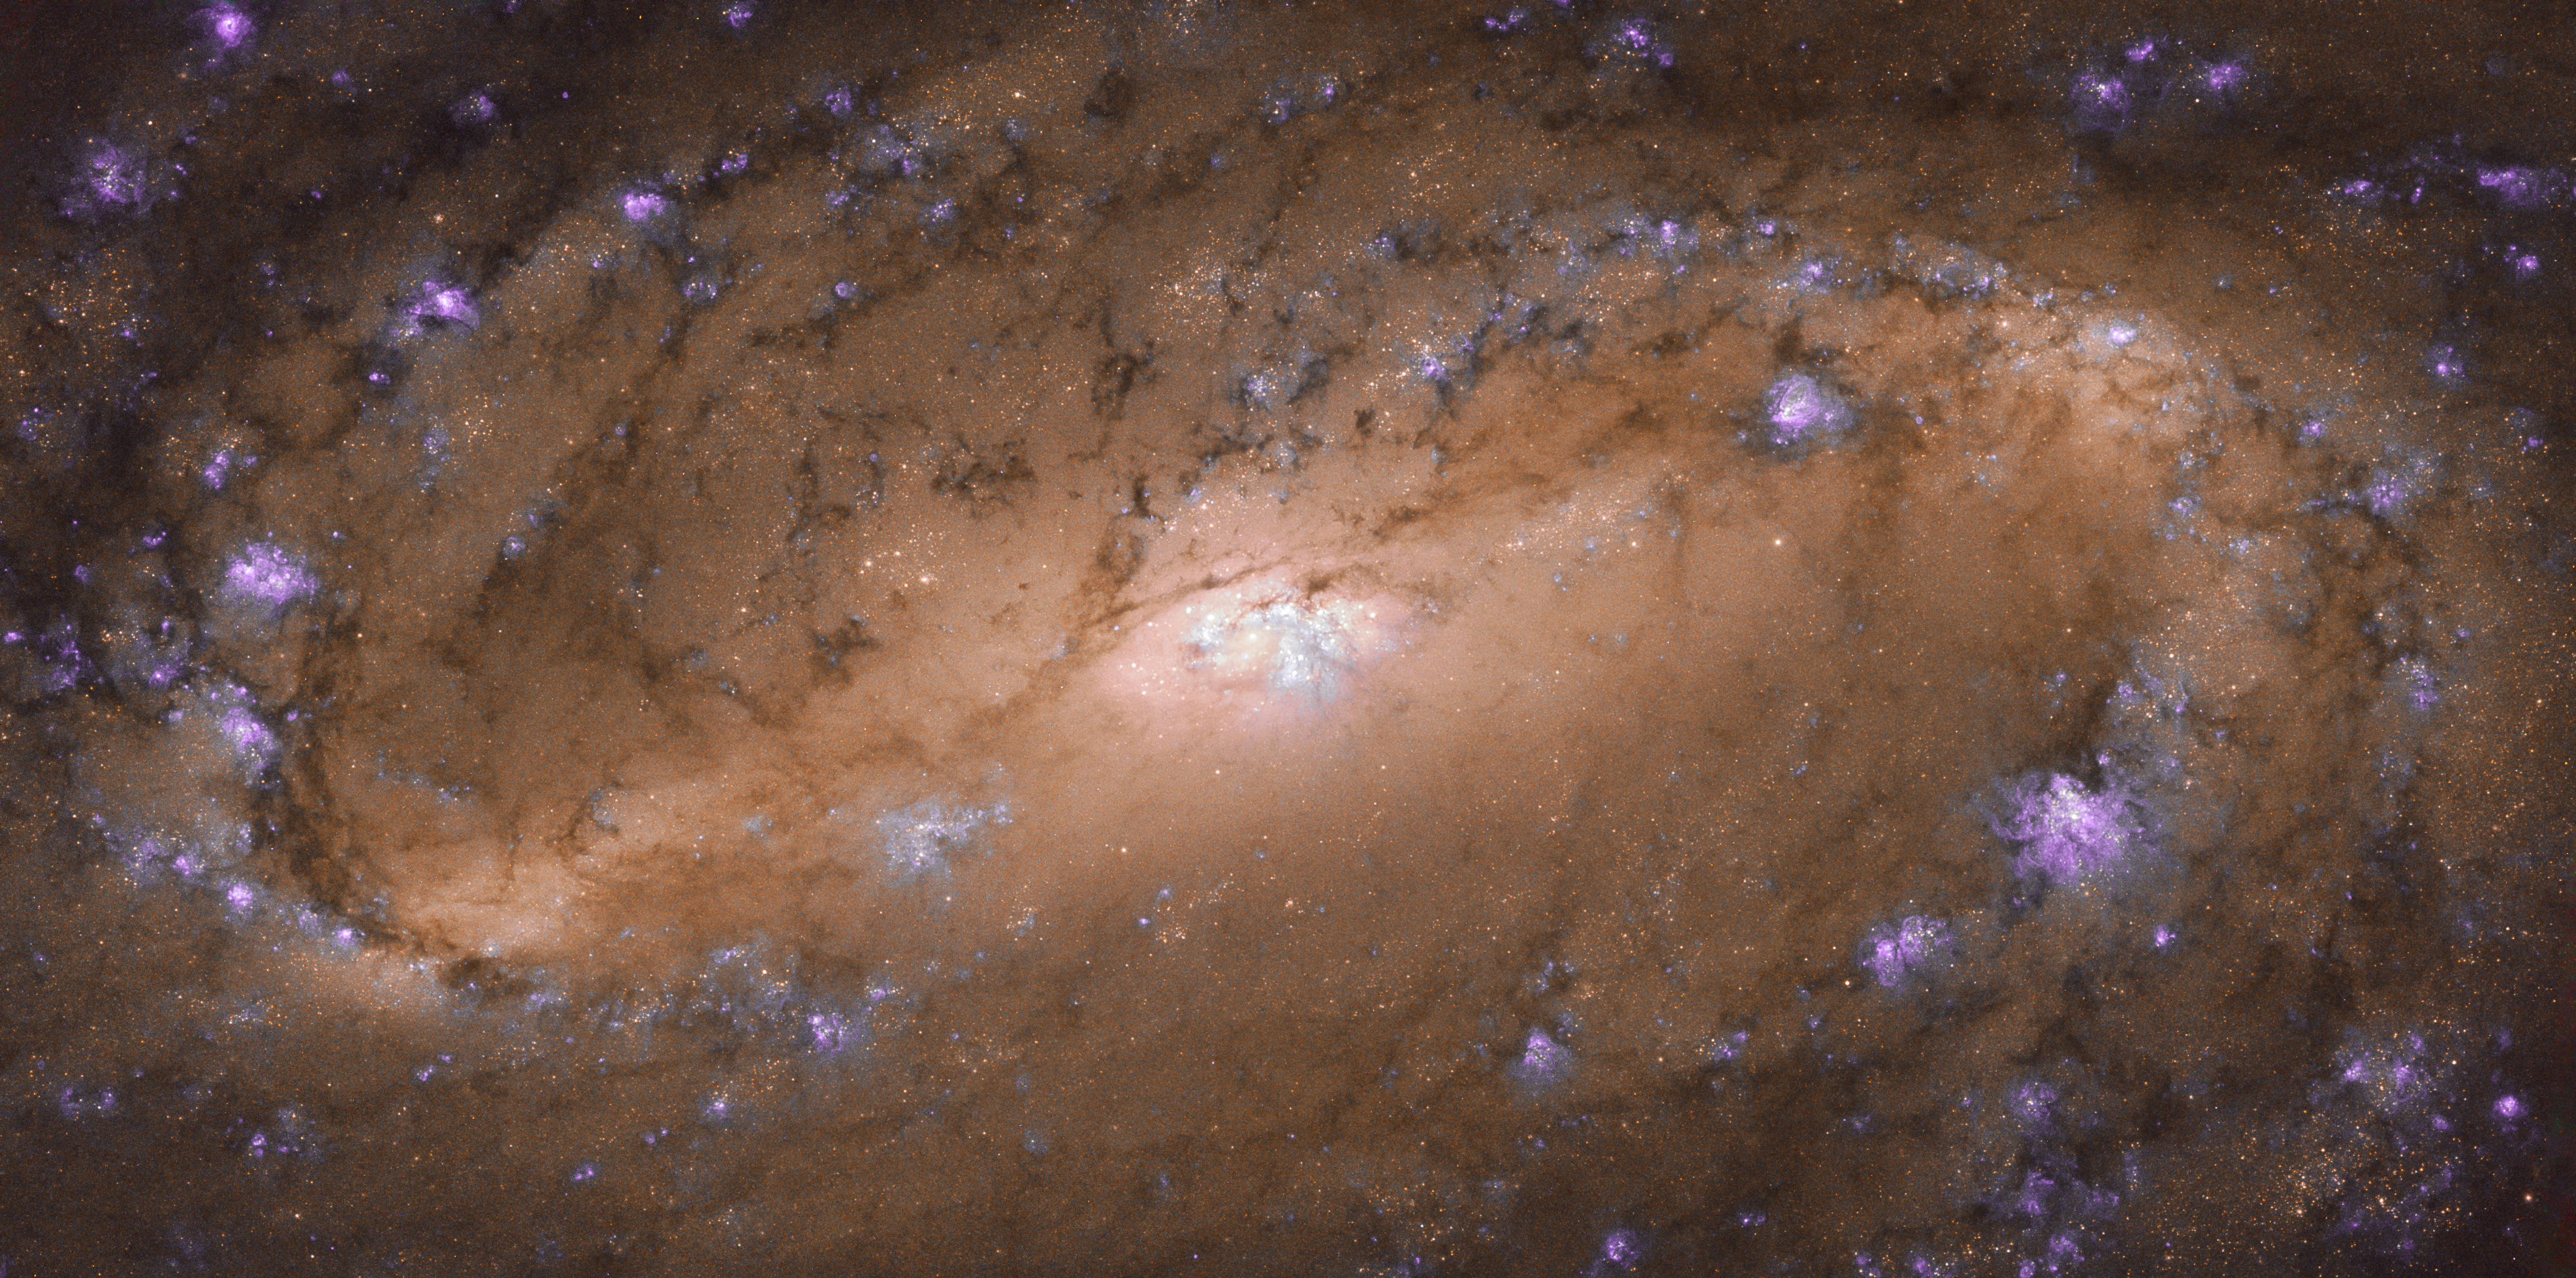

Iconic

Few of the Universe’s residents are as iconic as the spiral galaxy. These limelight-hogging celestial objects combine whirling, pinwheeling arms with scatterings of sparkling stars, glowing bursts of gas, and dark, weaving lanes of cosmic dust, creating truly awesome scenes — especially when viewed through a telescope such as the NASA/ESA Hubble Space Telescope. In fact, this image from Hubble frames a perfect spiral specimen: the stunning NGC 2903.

NGC 2903 is located about 30 million light-years away in the constellation of Leo (The Lion), and was studied as part of a Hubble survey of the central regions of roughly 145 nearby disc galaxies. This study aimed to help astronomers better understand the relationship between the black holes that lurk at the cores of galaxies like these, and the rugby-ball-shaped bulge of stars, gas, and dust at the galaxy’s centre — such as that seen in this image.

Credit: ESA/Hubble & NASA, L. Ho et al.